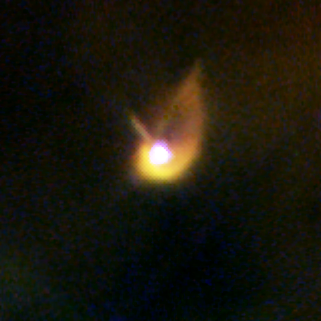

Proplyd in the Orion Nebula

Planet formation is a hazardous process. These four snapshots, taken by NASA/ESA Hubble Space Telescope, show dust disks around embryonic stars in the Orion Nebula being 'blowtorched' by a blistering flood of ultraviolet radiation from the region's brightest star. Within these disks are the seeds of planets. The doomed systems look like hapless comets, with wayward tails of gas boiling off the withering, pancake-shaped disks.

Credit: NASA/ESA, J. Bally (University of Colorado, Boulder, CO), H. Throop (Southwest Research Institute, Boulder, CO), C.R. O'Dell (Vanderbilt University, Nashville, TN)